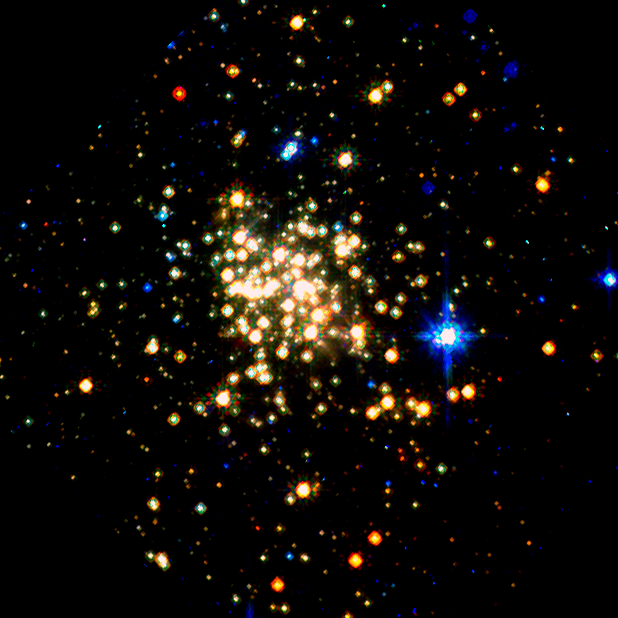

Arches Cluster: Hubble/NICMOS (1997)

This ESO/NASA Hubble Space Telescope picture presents the Arches Cluster, the densest known star cluster in the Milky Way. It is located about 25 000 light years from Earth in the constellation of Sagittarius. The radius of the cluster is only about one light year, but it contains about 150 stars, all of which are larger and more massive than the Sun.

Credit: NASA, ESA and D. Figer (STScI)